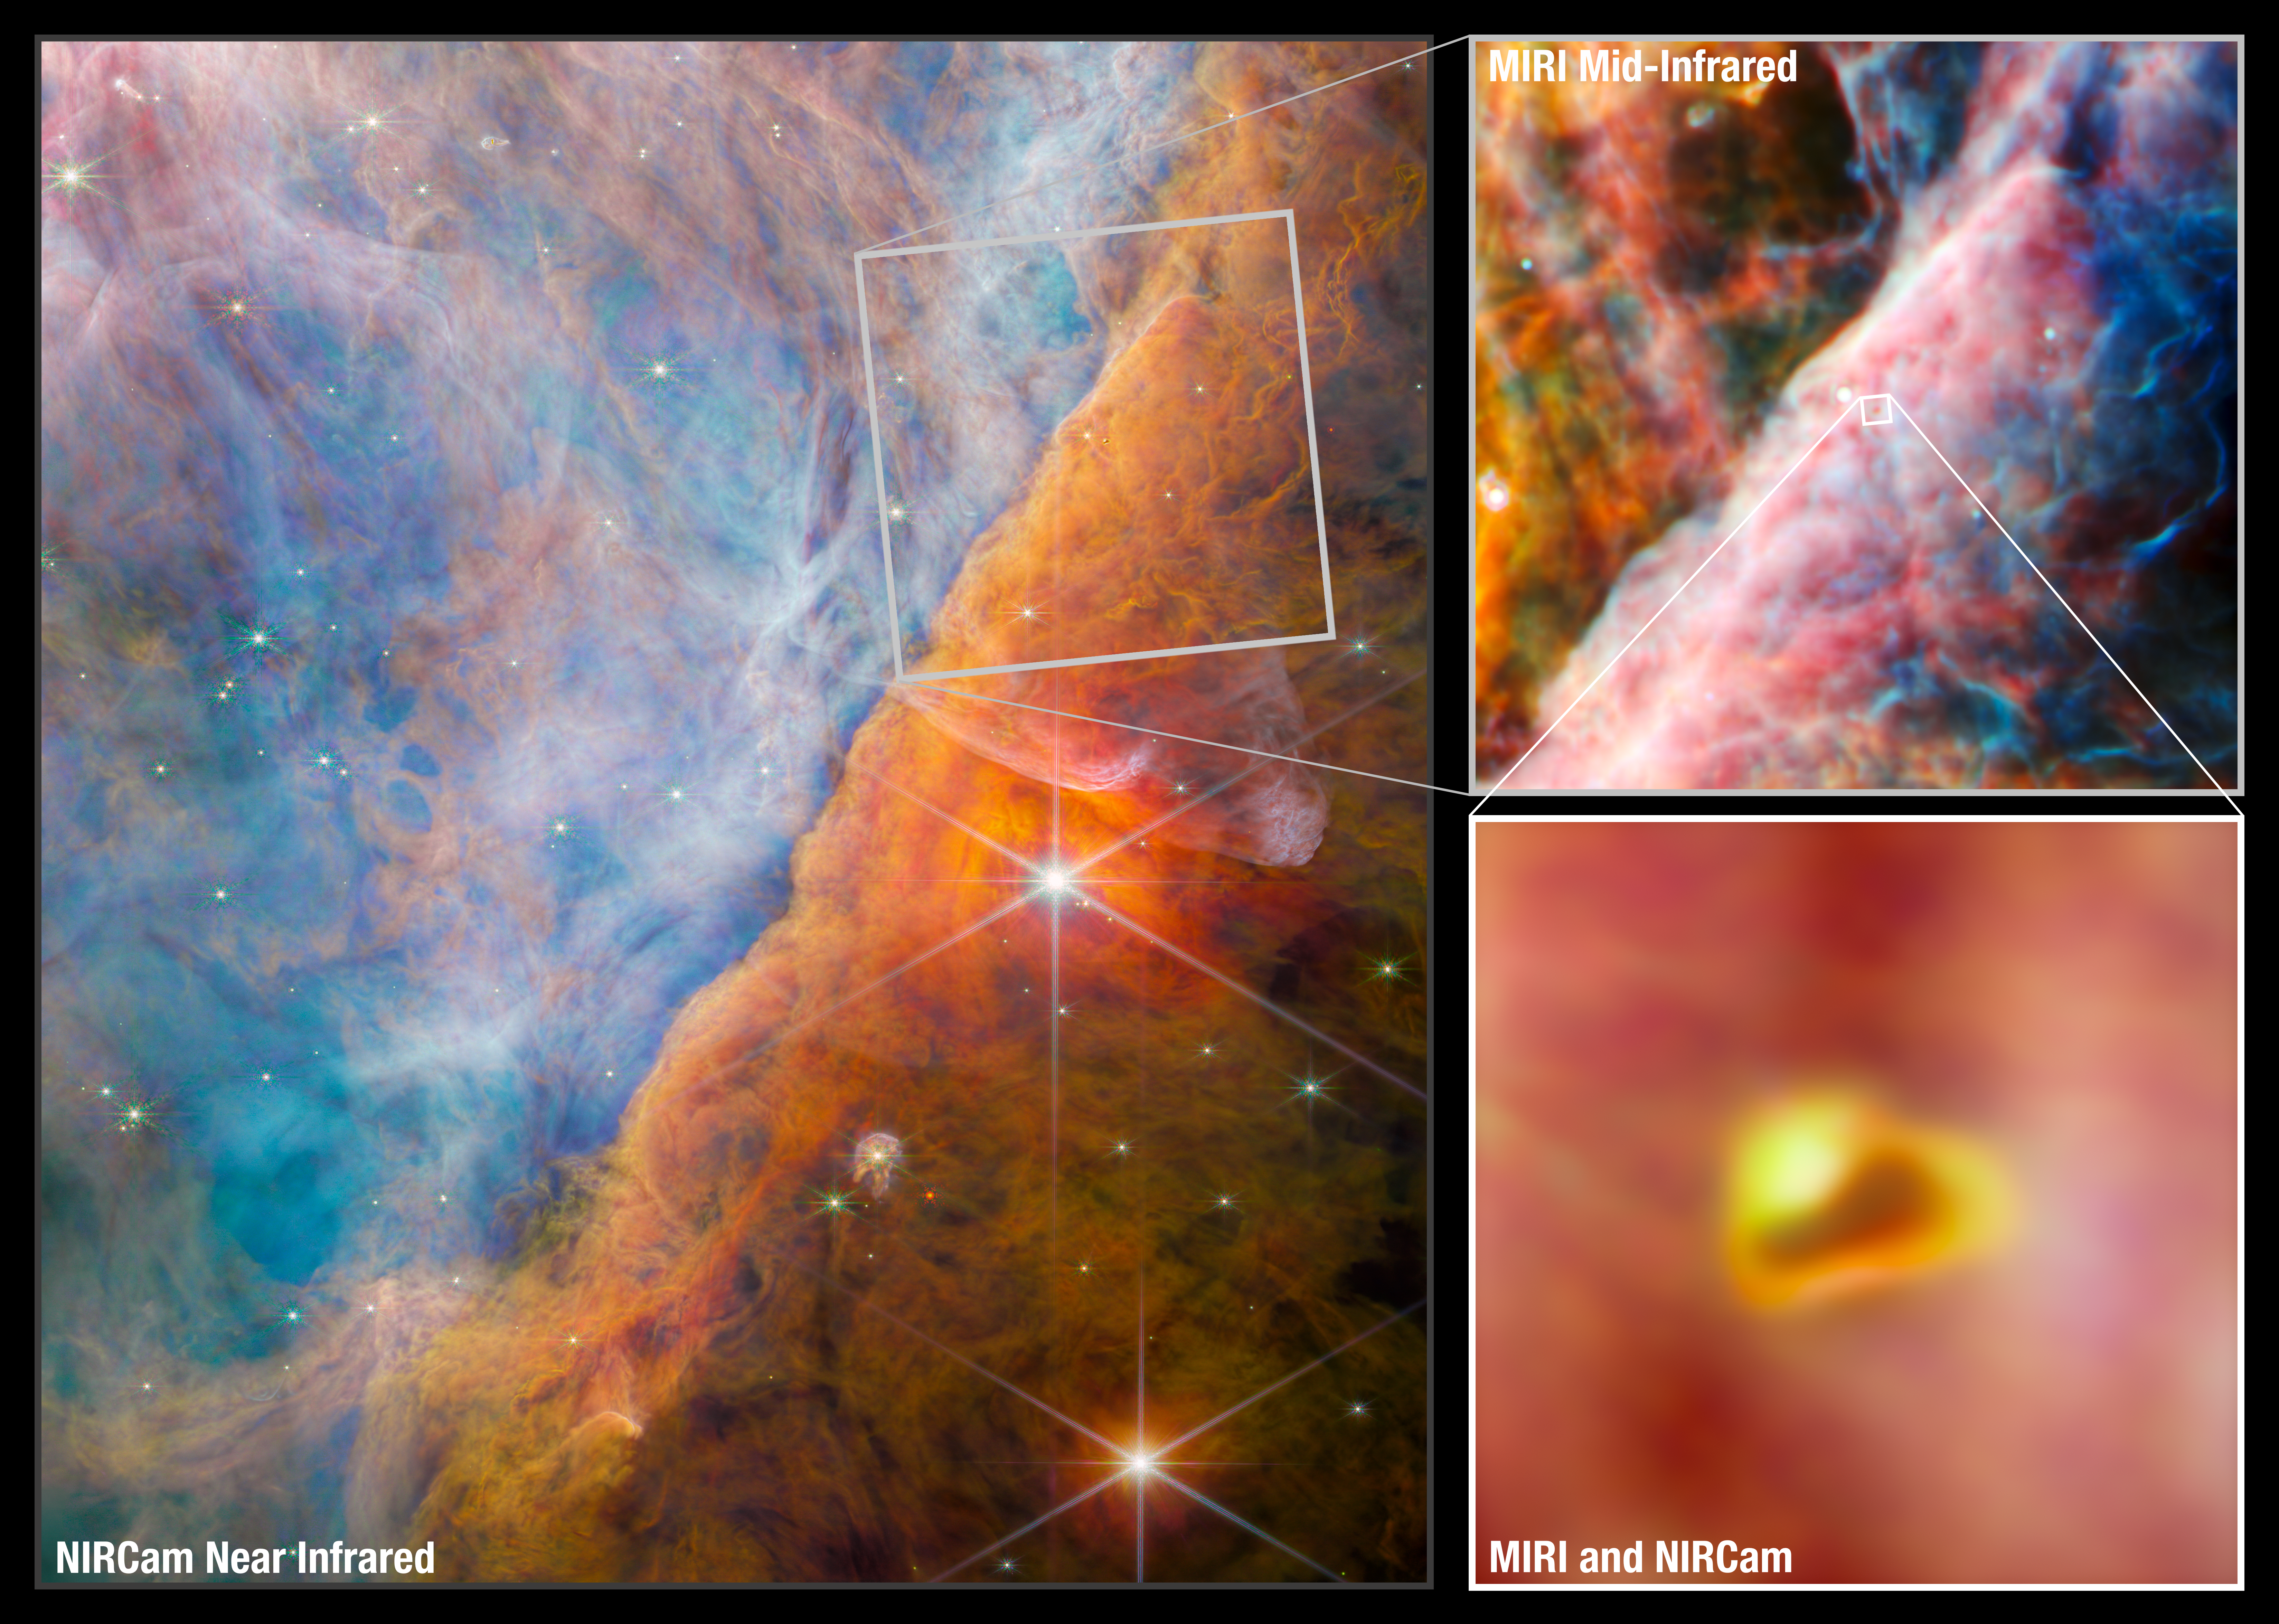

Webb studies the Orion Nebula

An international team of scientists have used data collected by the NASA/ESA/CSA James Webb Space Telescope to detect a molecule known as the methyl cation (CH3+) for the first time, located in the protoplanetary disc surrounding a young star. They accomplished this feat with a cross-disciplinary expert analysis, including key input from laboratory spectroscopists. The vital role of CH3+ in interstellar carbon chemistry has been predicted since the 1970s, but Webb’s unique capabilities have finally made observing it possible — in a region of space where planets capable of accommodating life could eventually form.

This graphic shows the area, in the centre of the Orion Nebula, that was studied by the team. The nebula lies about 1350 light-years from Earth. The largest image, on the left, is from Webb’s NIRCam instrument. On the right, the telescope is focused on a smaller area, where the team have used Webb’s MIRI instrument to add more depth to their study. A total of eighteen filters across both the MIRI and NIRCam instruments were used in these images, covering a range of wavelengths from 1.4 microns in the near-infrared to 25.5 microns in the mid-infrared. The detailed coverage was necessary for the team to study the light from protoplanetary discs, and analyse the unique features revealed by Webb using spectroscopy from its MIRI and NIRSpec instruments.

The region captured here in breathtaking detail by Webb is a part of the Orion Nebula known as the Orion Bar. It is an ionisation front, where energetic far-ultraviolet light from the Trapezium Cluster — located off the upper-left corner — interacts with dense molecular clouds. The energy of the stellar radiation is slowly eroding the Orion Bar, and this has a profound effect on the molecules and chemistry in the protoplanetary discs that have formed around newborn stars here.

At the very centre of the MIRI area is an ionised star-protoplanetary disc system, or proplyd, named d203-506. The pullout at the bottom right displays a combined NIRCam and MIRI image of this young system. Its extended shape is due to pressure from the harsh ultraviolet radiation striking it. The first clear images of proplyds in the Orion Nebula were obtained by the NASA/ESA Hubble Space Telescope, including d203-506. Now Webb’s extended infrared vision adds to the picture, as the team of astronomers were able to confirm that the methyl cation molecule is present in this very proplyd.

Credit: ESA/Webb, NASA, CSA, M. Zamani (ESA/Webb), the PDRs4All ERS Team